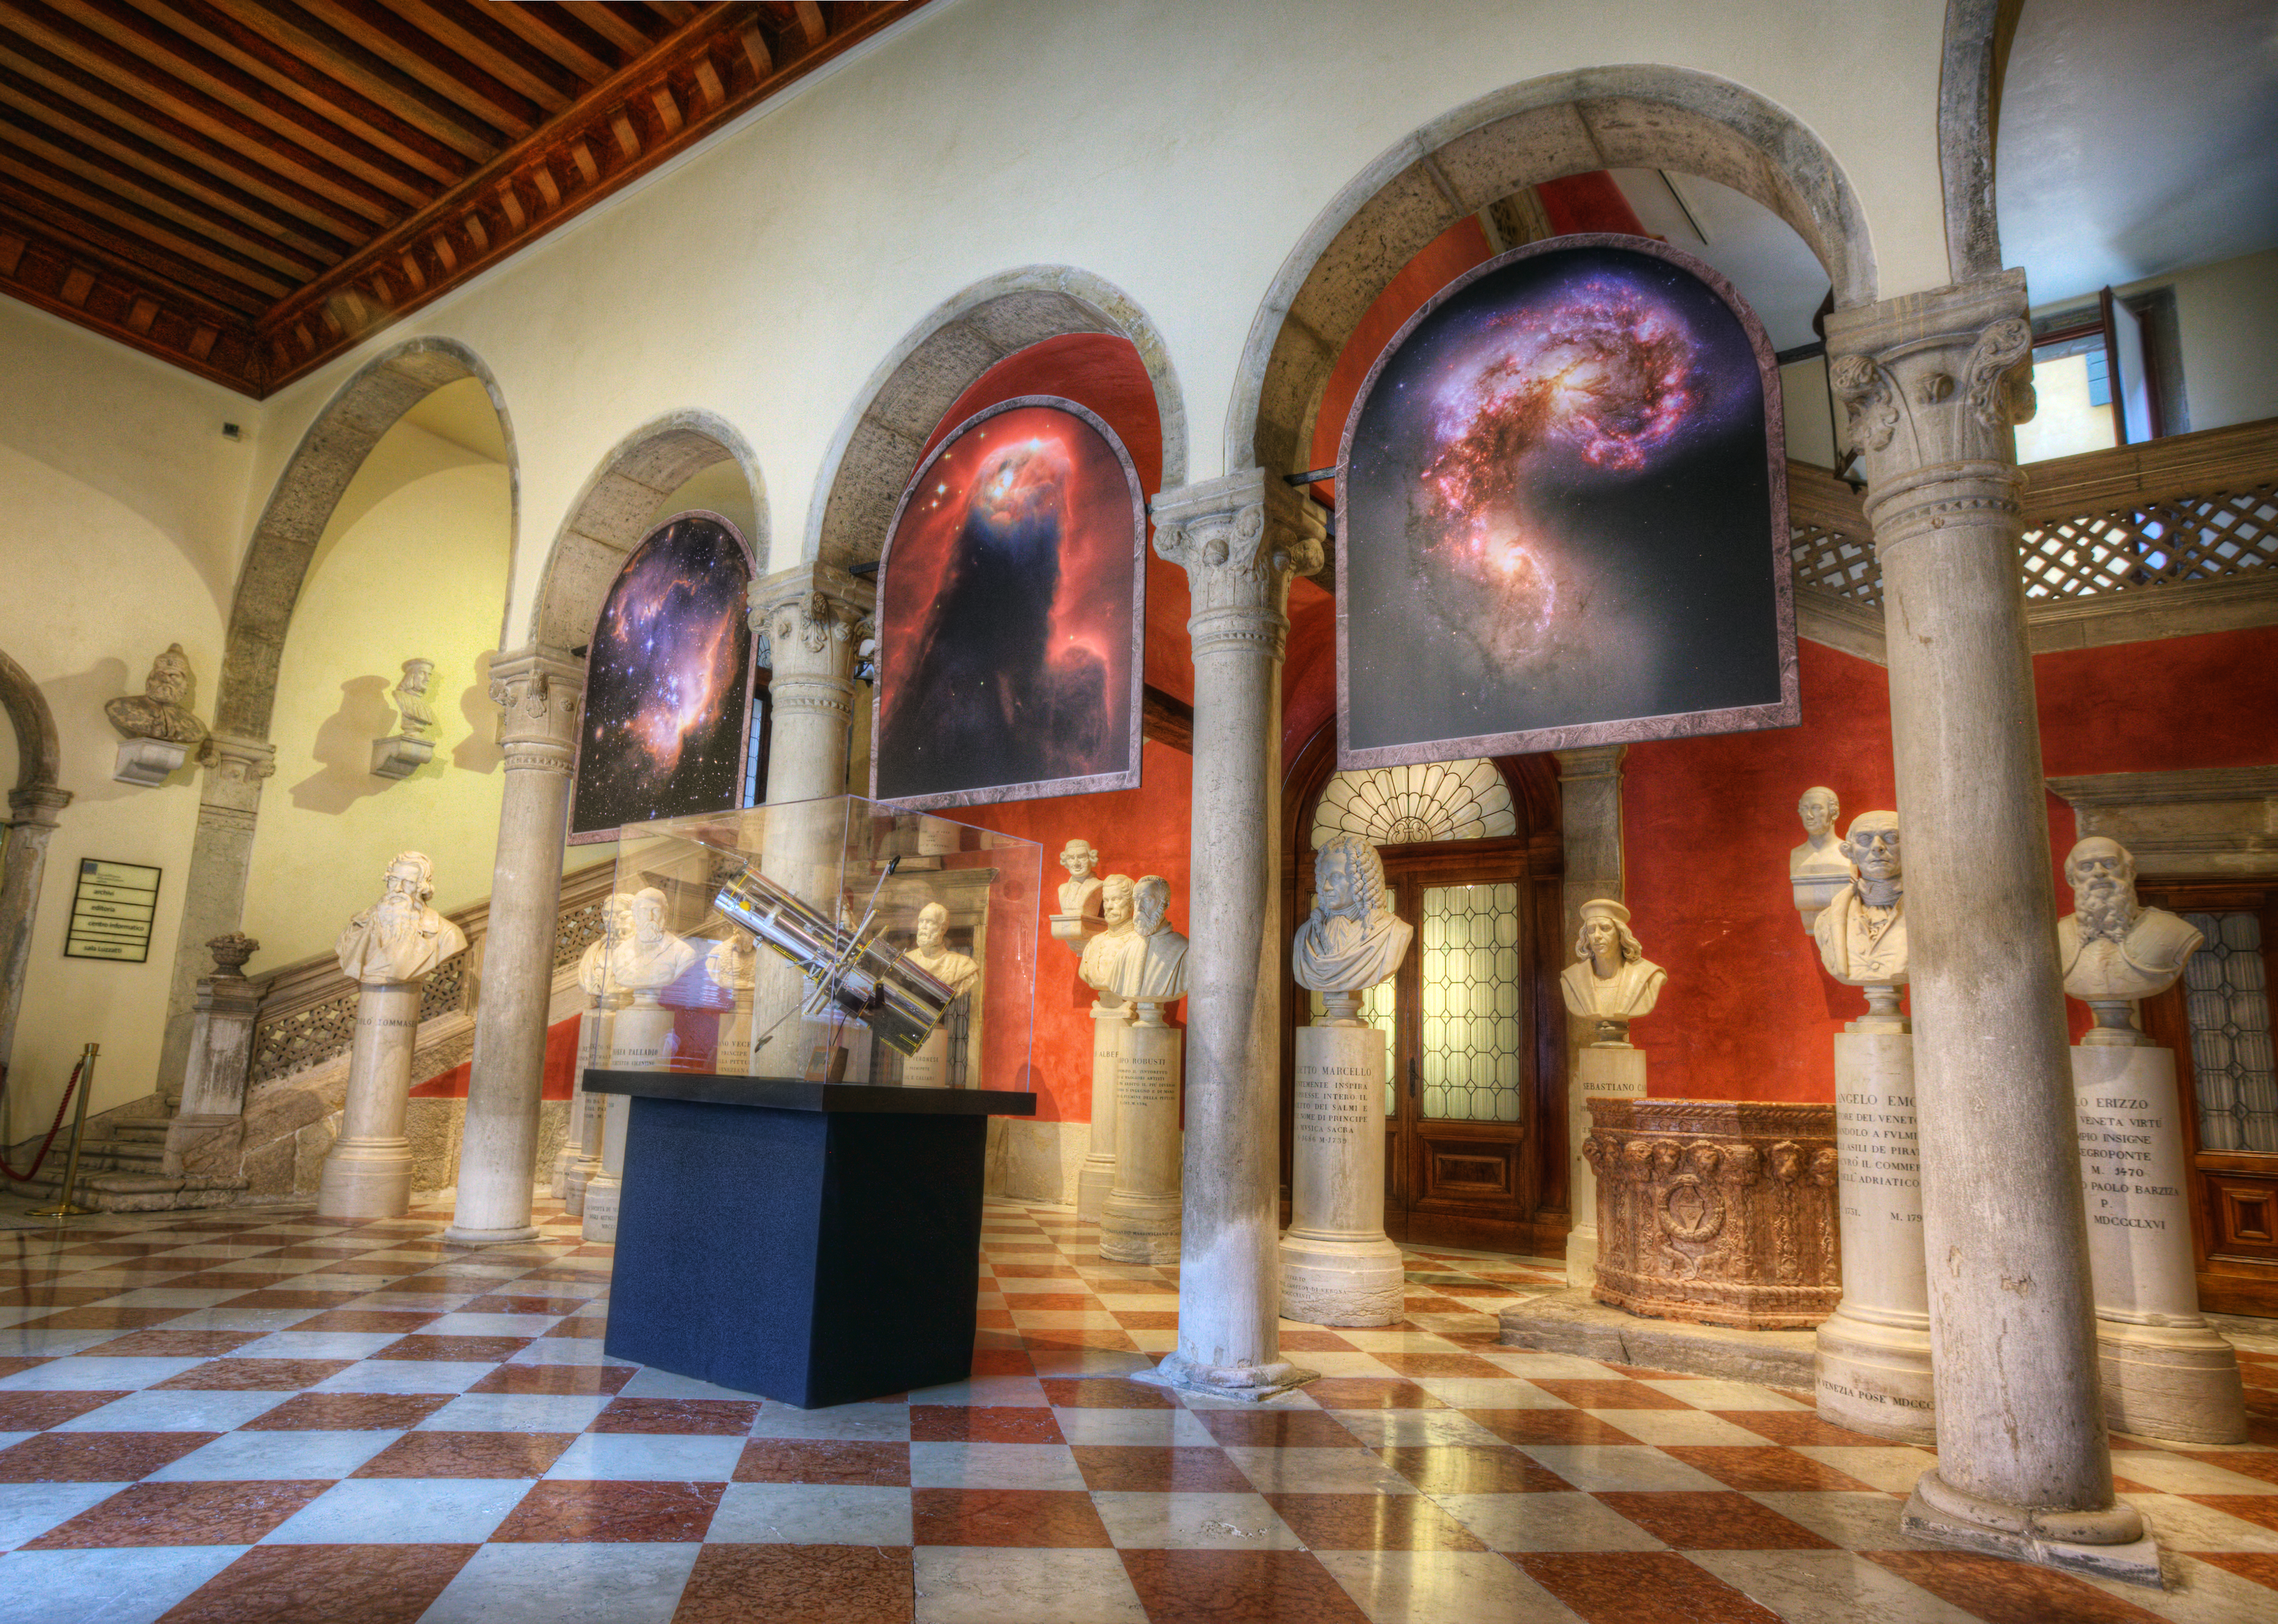

“The Hubble Space Telescope: twenty years at the frontier of science exhibition

The Hubble Space Telescope: Twenty Years at the Frontier of Science exhibition at the Istituto Veneto di Scienze, Lettere ed Arti in their beautiful and historic Palazzo Loredan. Exhibits include many breathtaking photos taken over the years by the famous orbiting observatory, as well as artifacts from the telescope and tools used by astronomers in their missions to repair and upgrade it.

Credit: ESA/Hubble